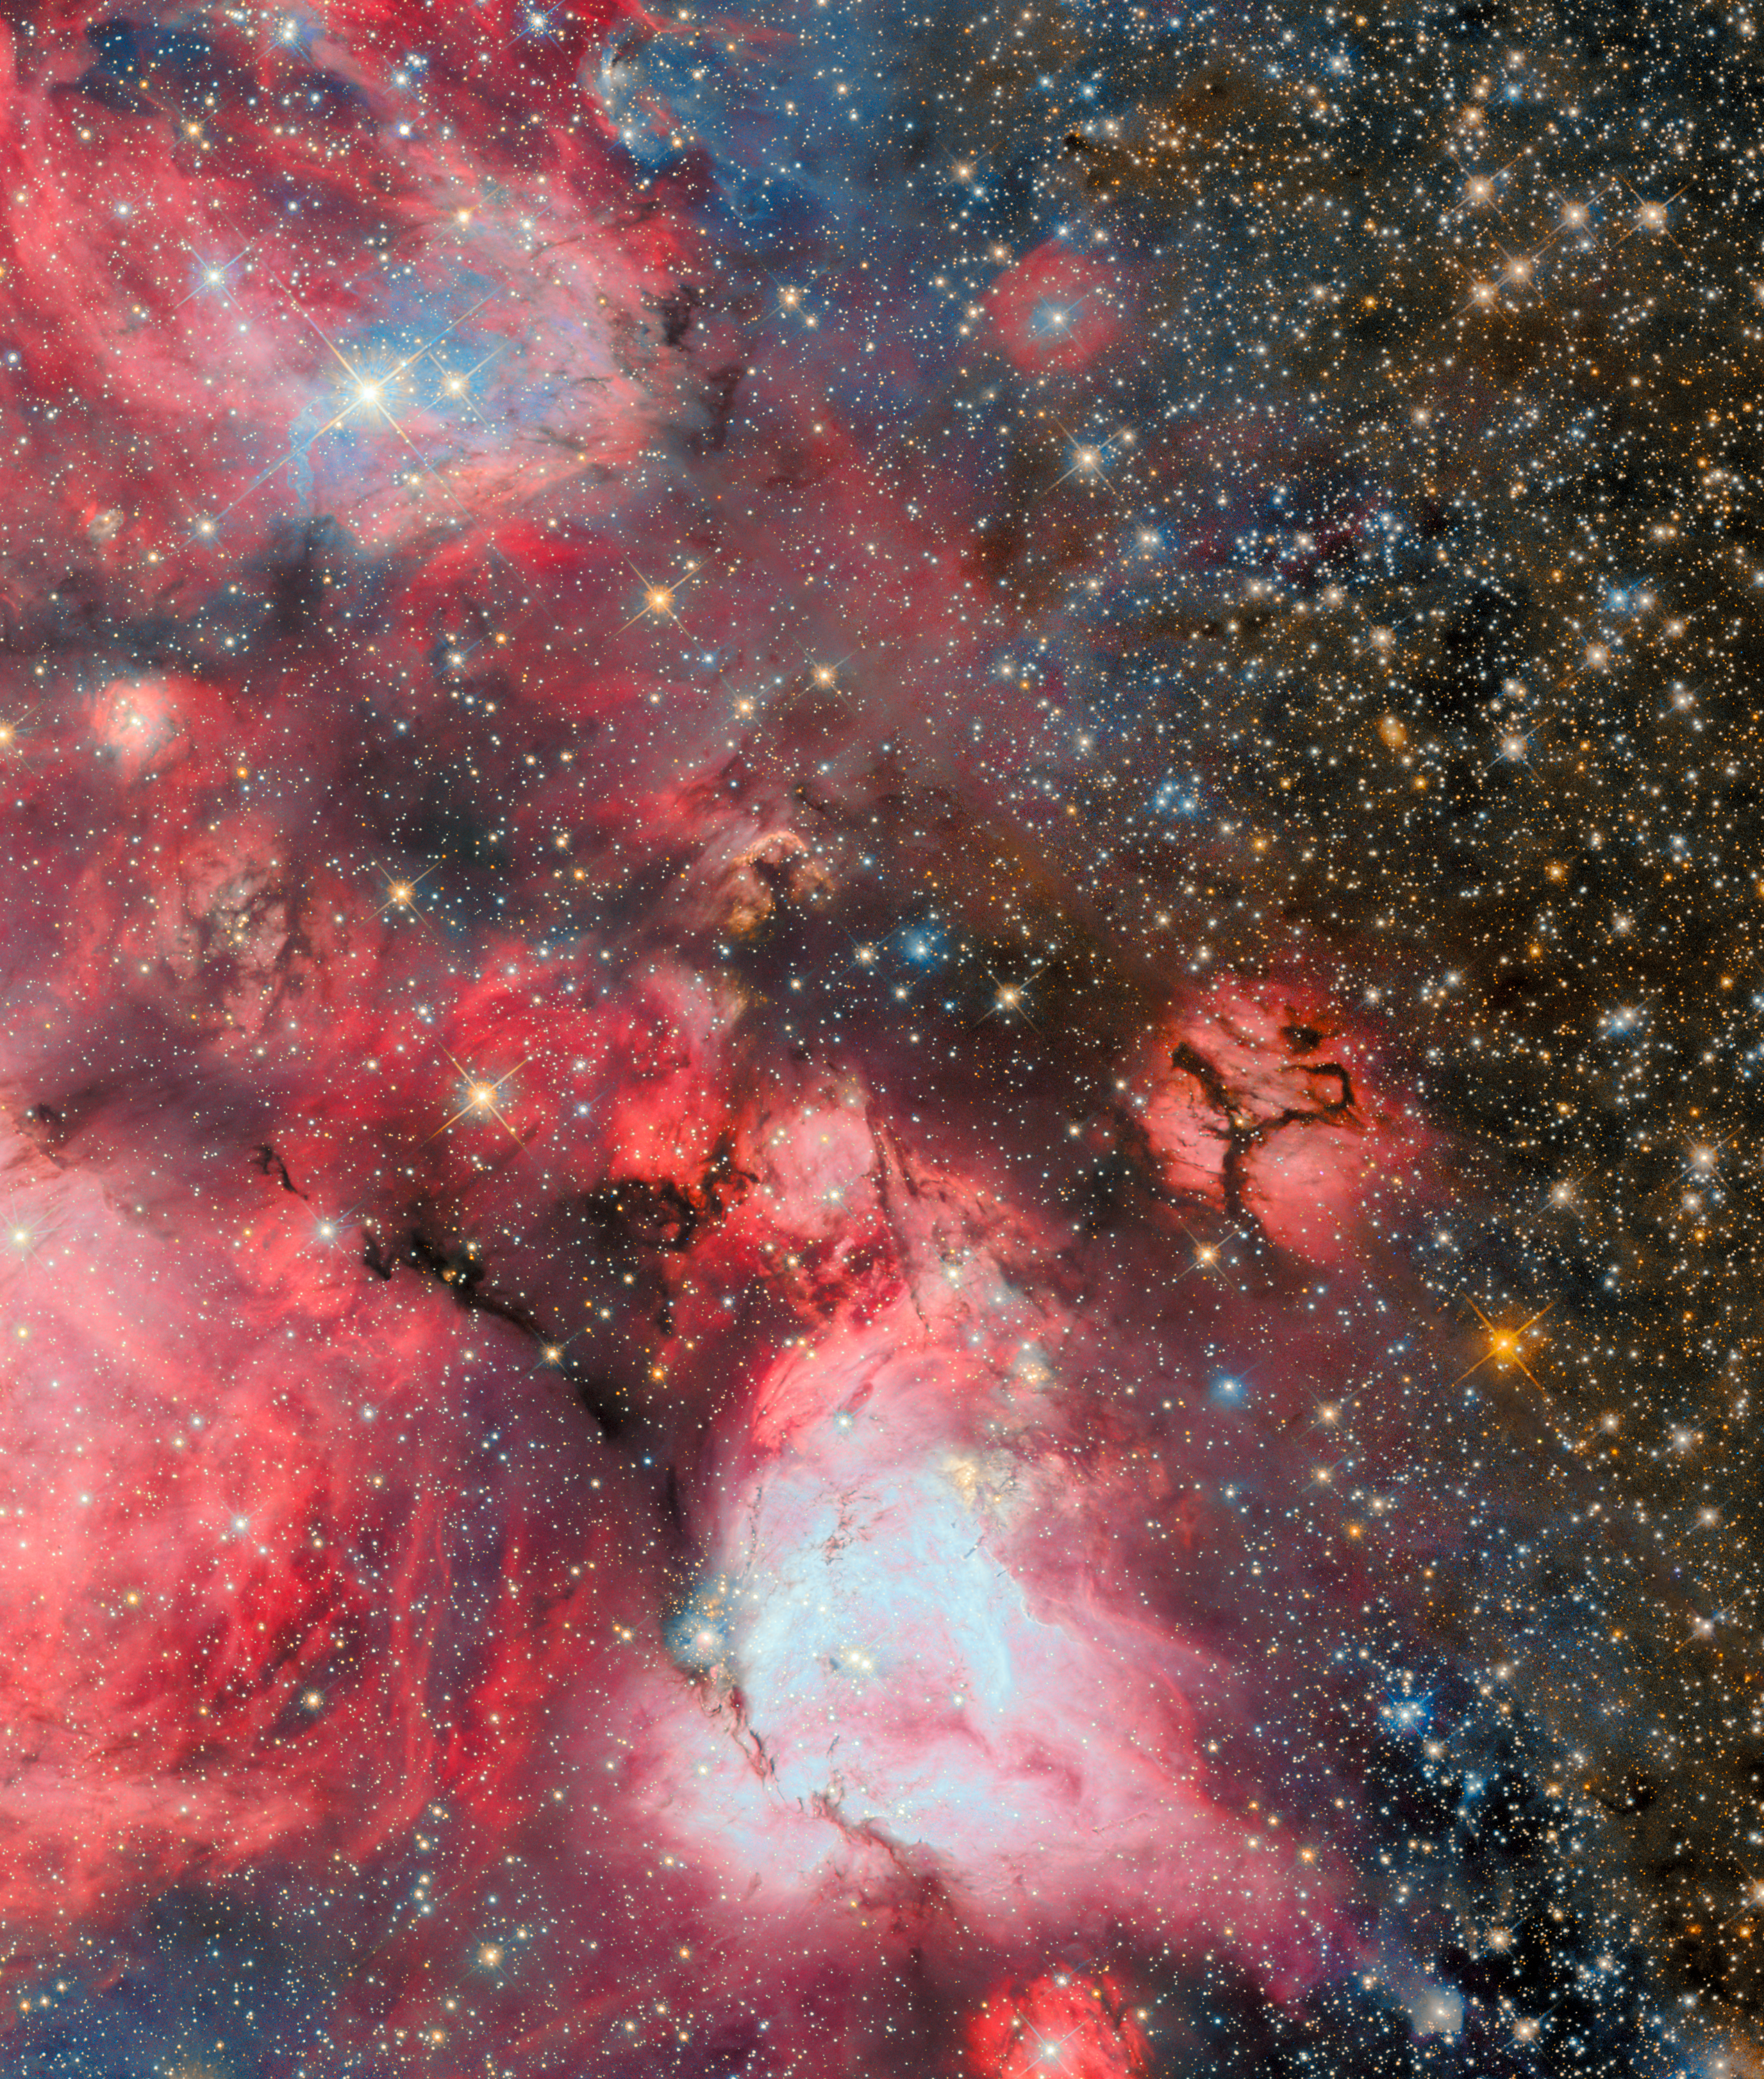

Baby stars blowing bubbles

Today’s ESA/Hubble Picture of the Week brings a distant stellar birthplace into focus. This gigantic cloud of cold hydrogen gas is called N159, and it’s located about 160 000 light-years away in the constellation Dorado. N159 is one of the most massive star-forming clouds in the Large Magellanic Cloud, a dwarf galaxy that is the largest of the small galaxies that orbit the Milky Way.

This image shows just a portion of the N159 star-forming complex. The entire complex stretches over 150 light-years across. To put that into perspective, 150 light-years is nearly 10 million times the distance between Earth and the Sun!

In the subzero interior of this gas cloud, subjected to the crushing pressure of gravity, young stars begin to gleam in the darkness. Particularly hot and high-mass stars illuminate their birthplaces with red light. This red glow is characteristic of excited hydrogen atoms, to which Hubble is exquisitely sensitive.

Though some of the bright stars in the cloud appear to be blanketed with reddish gas, others seem to lie at the centre of a reddish bubble, through which the dark backdrop of space is visible. These bubbles are evidence of stellar feedback, in which young stars fry their habitats with high-energy radiation and blow bubbles with their intense stellar winds.

A previous Hubble image of the full N159 star-forming cloud was released in 2016. This version incorporates an additional wavelength of light to highlight the hot gas that surrounds newborn stars.

Credit: ESA/Hubble & NASA, R. Indebetouw